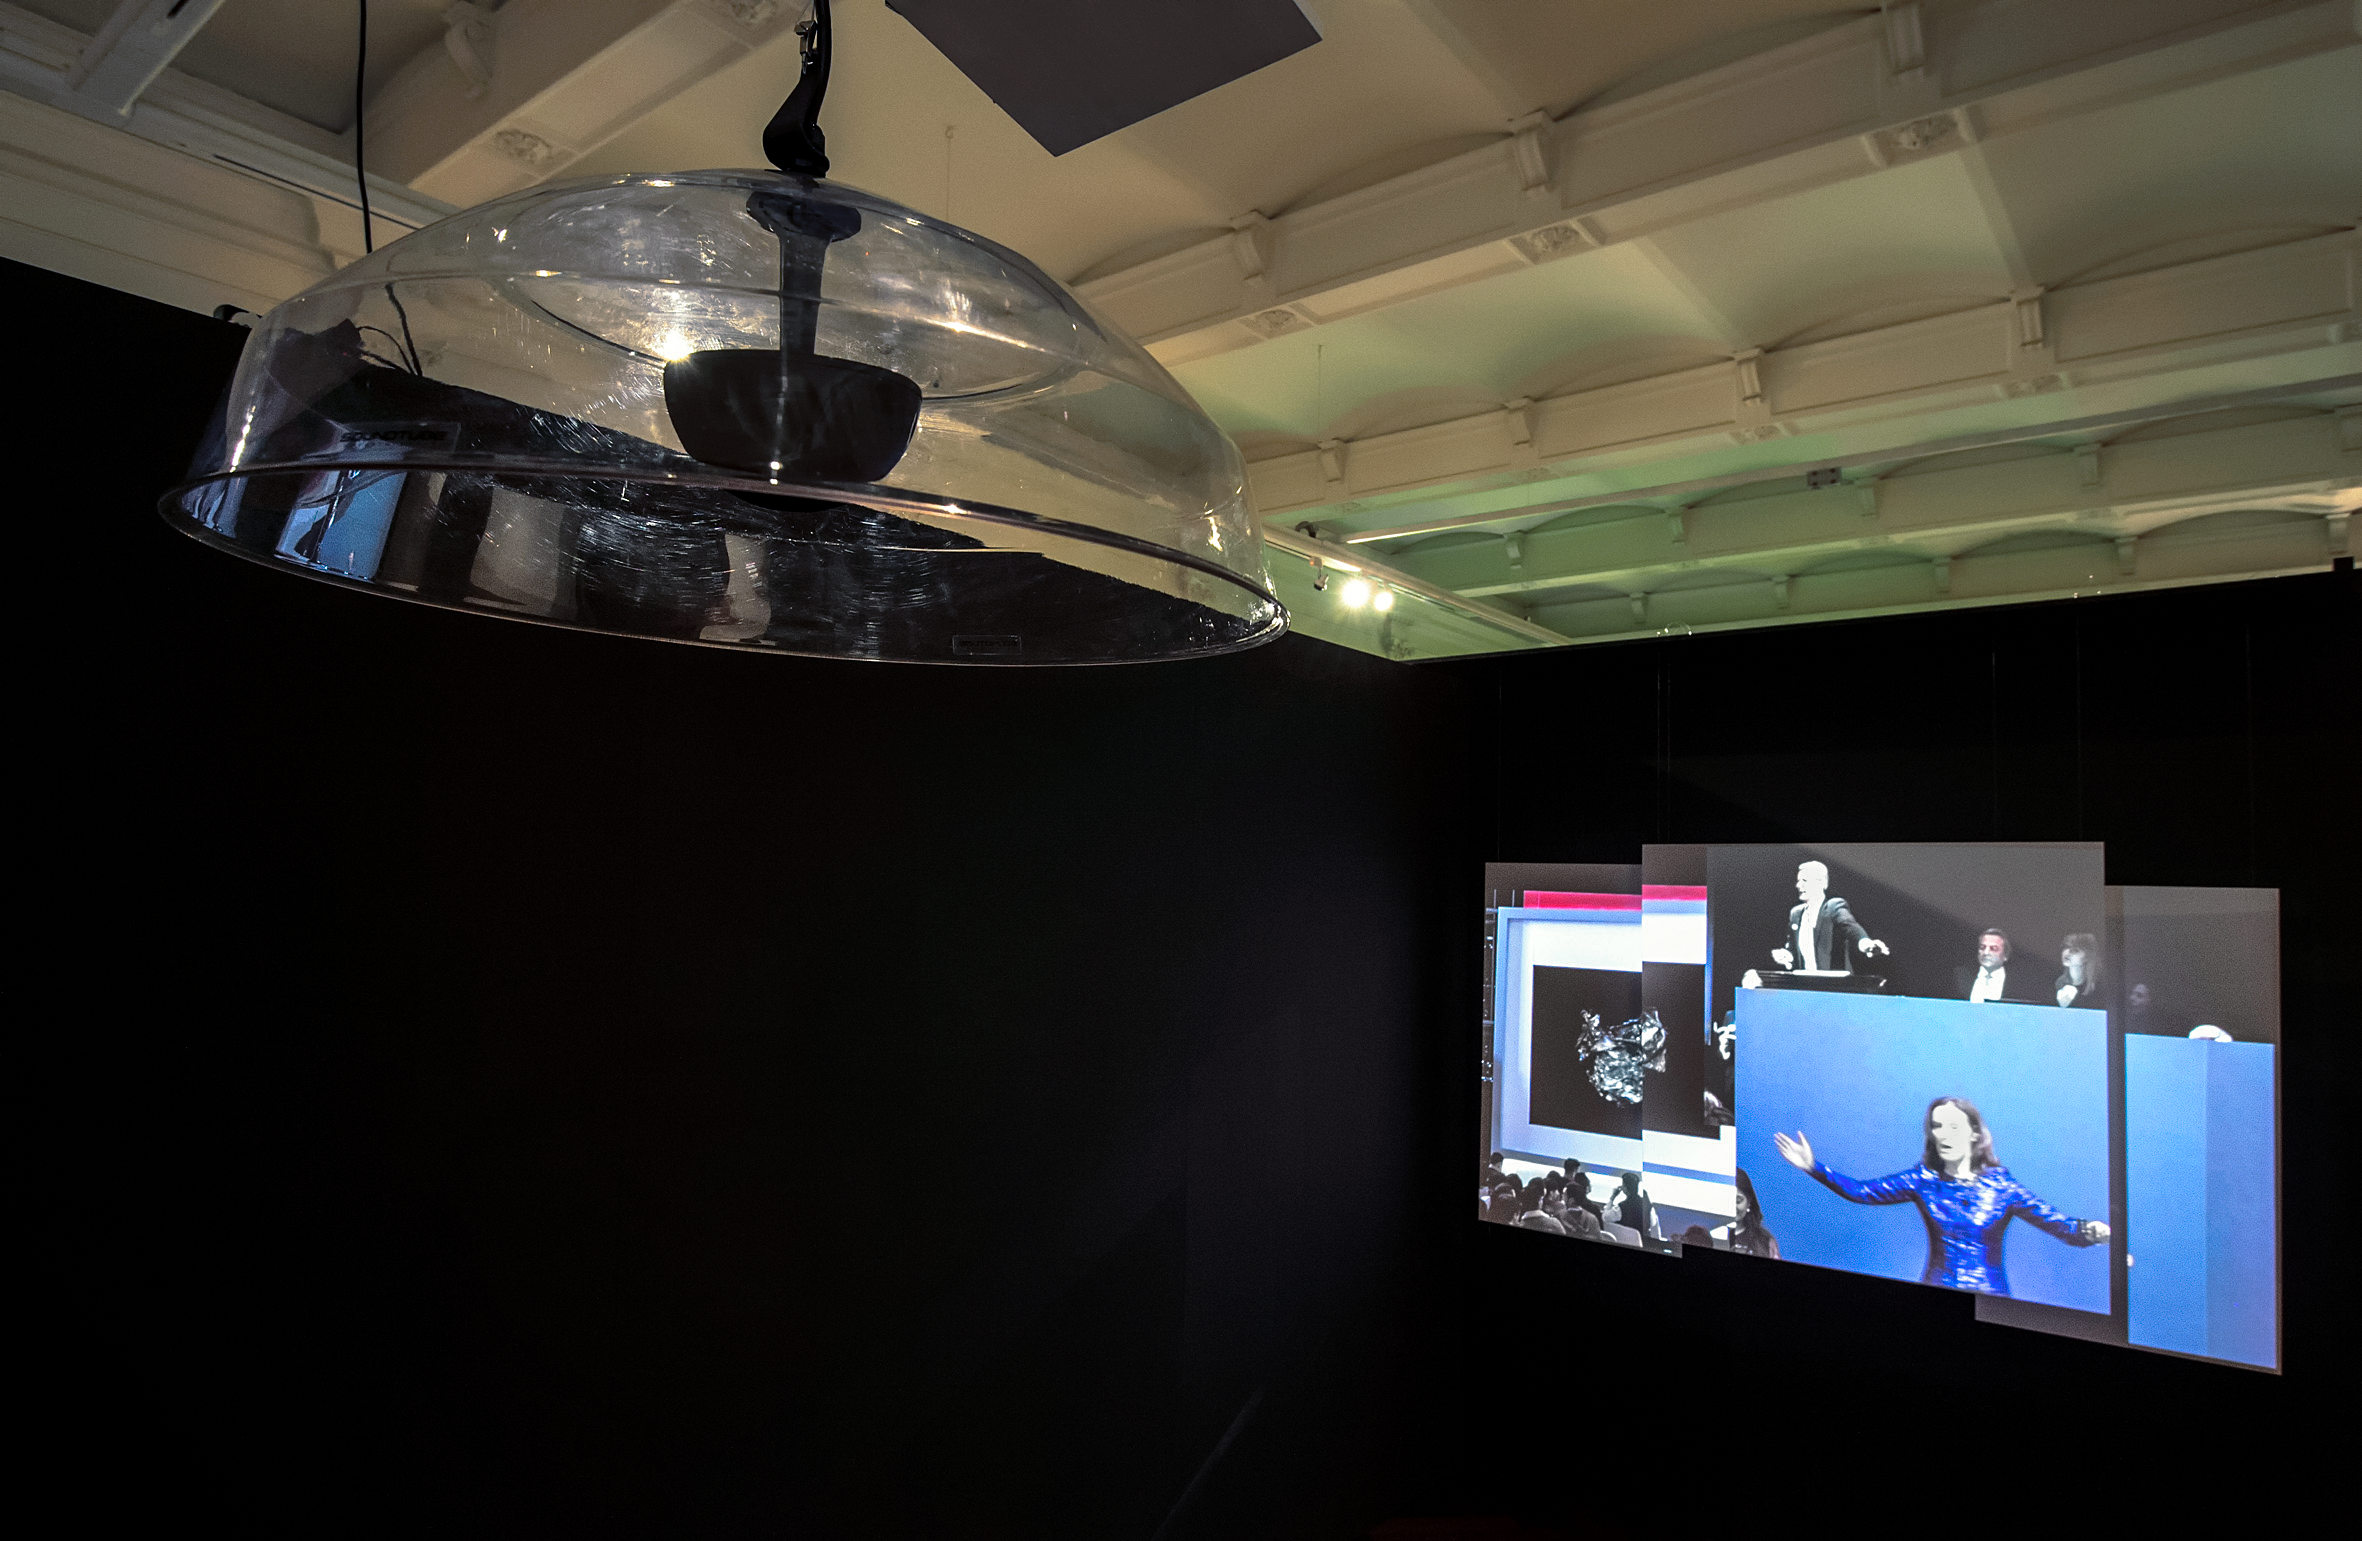

Our Place in Space — Welcome Home Hubble

In the video installation Welcome Home Hubble, created by the artists Eleni Boutsika-Palles and Anna Lerchbaumer the boundaries between fact and fiction become blurred. The installation creates a future in which the Hubble has reached the end of its life. The controlled re-entry into the atmosphere and the details and consequences of this mission served as inspiration for this work.

The video installation stages a speculative narrative in which Hubble is shown as a technological pop star. A look into the future, a few years after its re-entry, follows the surviving parts found on the coast of the Vanuatu Islands. What effects do the fragments have on the site of discovery? What is its economic, cultural and political value?

This installation was created for the Hubble travelling exhibition Our Place in Space in Vienna.

Credit: NHM Wien, Kurt Kracher